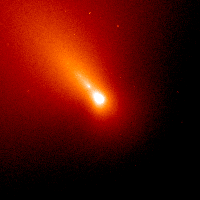

Comet Linear (July 7, 2000)

The nucleus cannot be seen in these images because it is about a mile or so across, which is too small for the Hubble telescope to see.

Credit: NASA/ESA, H. Weaver and P. Feldman (Johns Hopkins University), M. A'Hearn (University of Maryland), C. Arpigny (Liège University), M. Combi (University of Michigan), M. Festou (Observatoire Midi-Pyrénées), and G.-P. Tozzi (Arcetri Observatory)